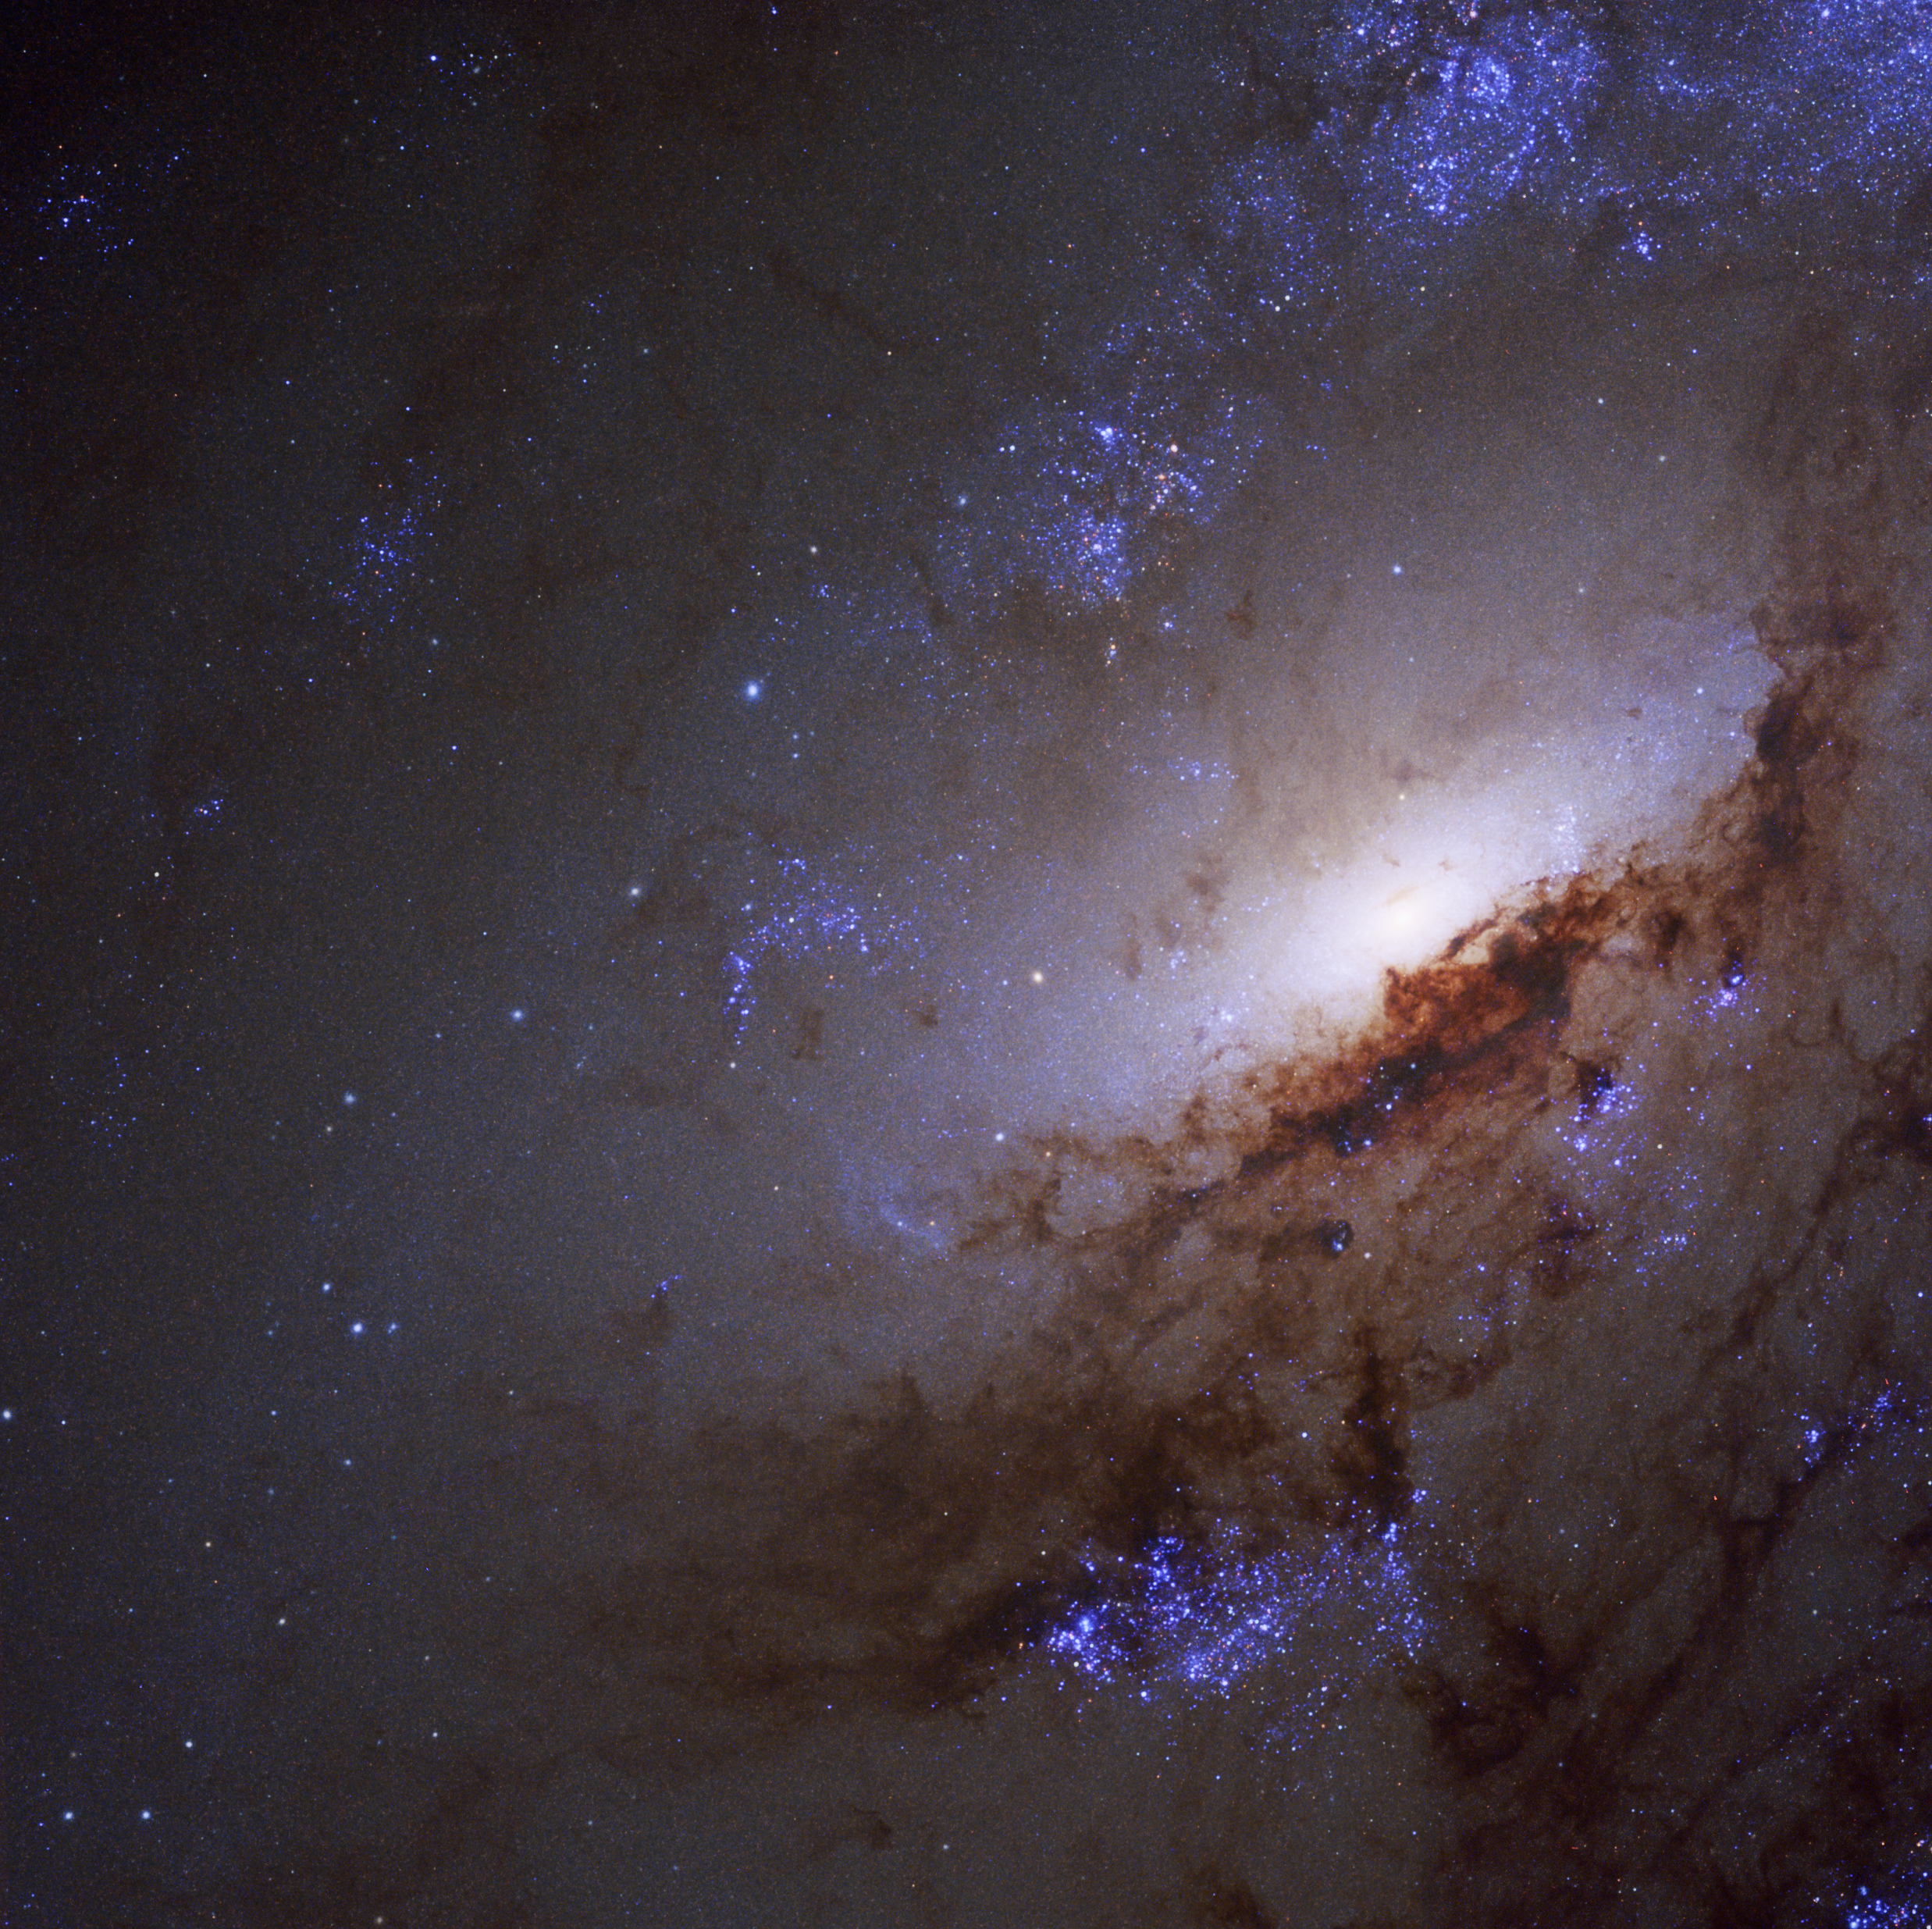

Parts of Messier 106

Messier 106, also known as NGC 4258, is a relatively nearby spiral galaxy, a little over 20 million light-years away. This makes it one of the nearest spiral galaxies.

Despite carrying his name, Messier 106 was neither discovered nor catalogued by the renowned 18th-century astronomer Charles Messier. Discovered by his assistant, Pierre Méchain, the galaxy was never added to the Messier catalogue in his lifetime. Along with six other objects discovered but not logged by the pair, Messier 106 was posthumously added to the catalogue in the 20th century.

An image of this galaxy was already released back in 2013 (heic1302). This newly-processed image now also shows ultraviolet radiation Hubble captured from the galaxy.

Credit: NASA, ESA, and the LEGUS team